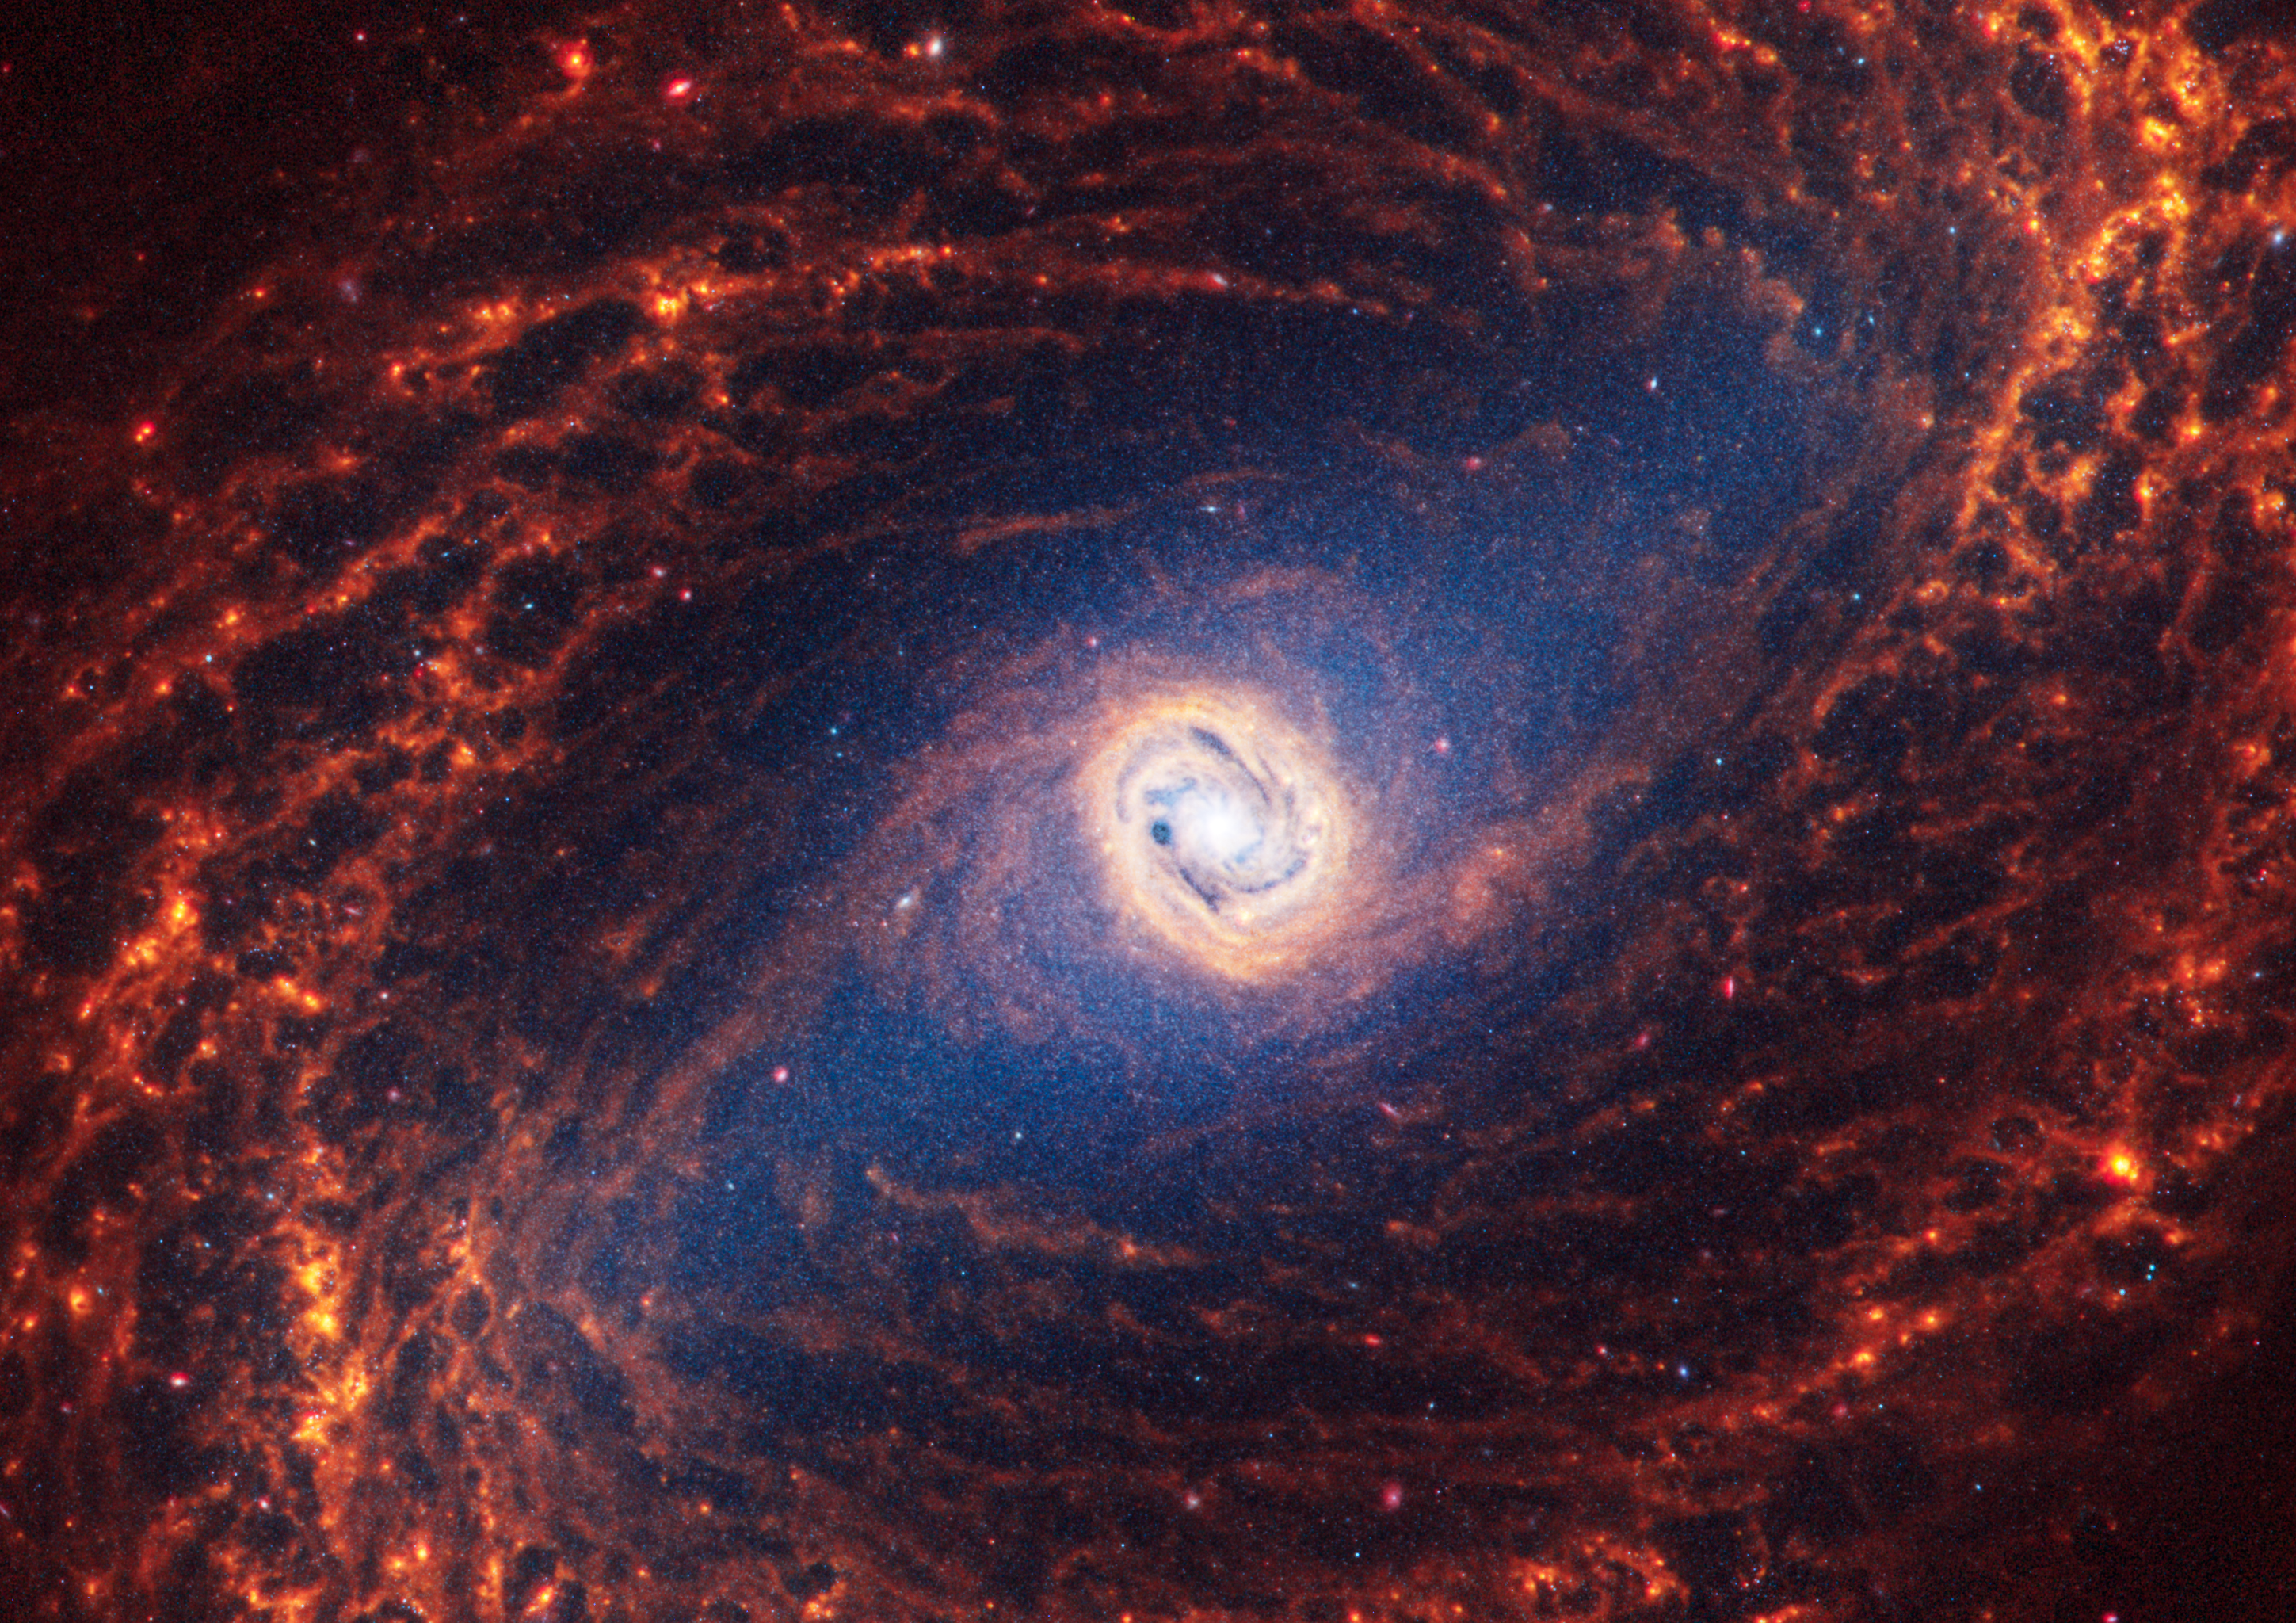

NGC 1433

This spiral galaxy was observed as part of the Physics at High Angular resolution in Nearby GalaxieS (PHANGS) program, a large project that includes observations from several space- and ground-based telescopes of many galaxies to help researchers study all phases of the star formation cycle, from the formation of stars within dusty gas clouds to the energy released in the process that creates the intricate structures revealed by Webb’s new images.

NGC 1433 is 46 million light-years away in the constellation Horologium.

Learn more about what can be seen in this vast collection of Webb images here.

Credit: NASA, ESA, CSA, STScI, J. Lee (STScI), T. Williams (Oxford), PHANGS Team